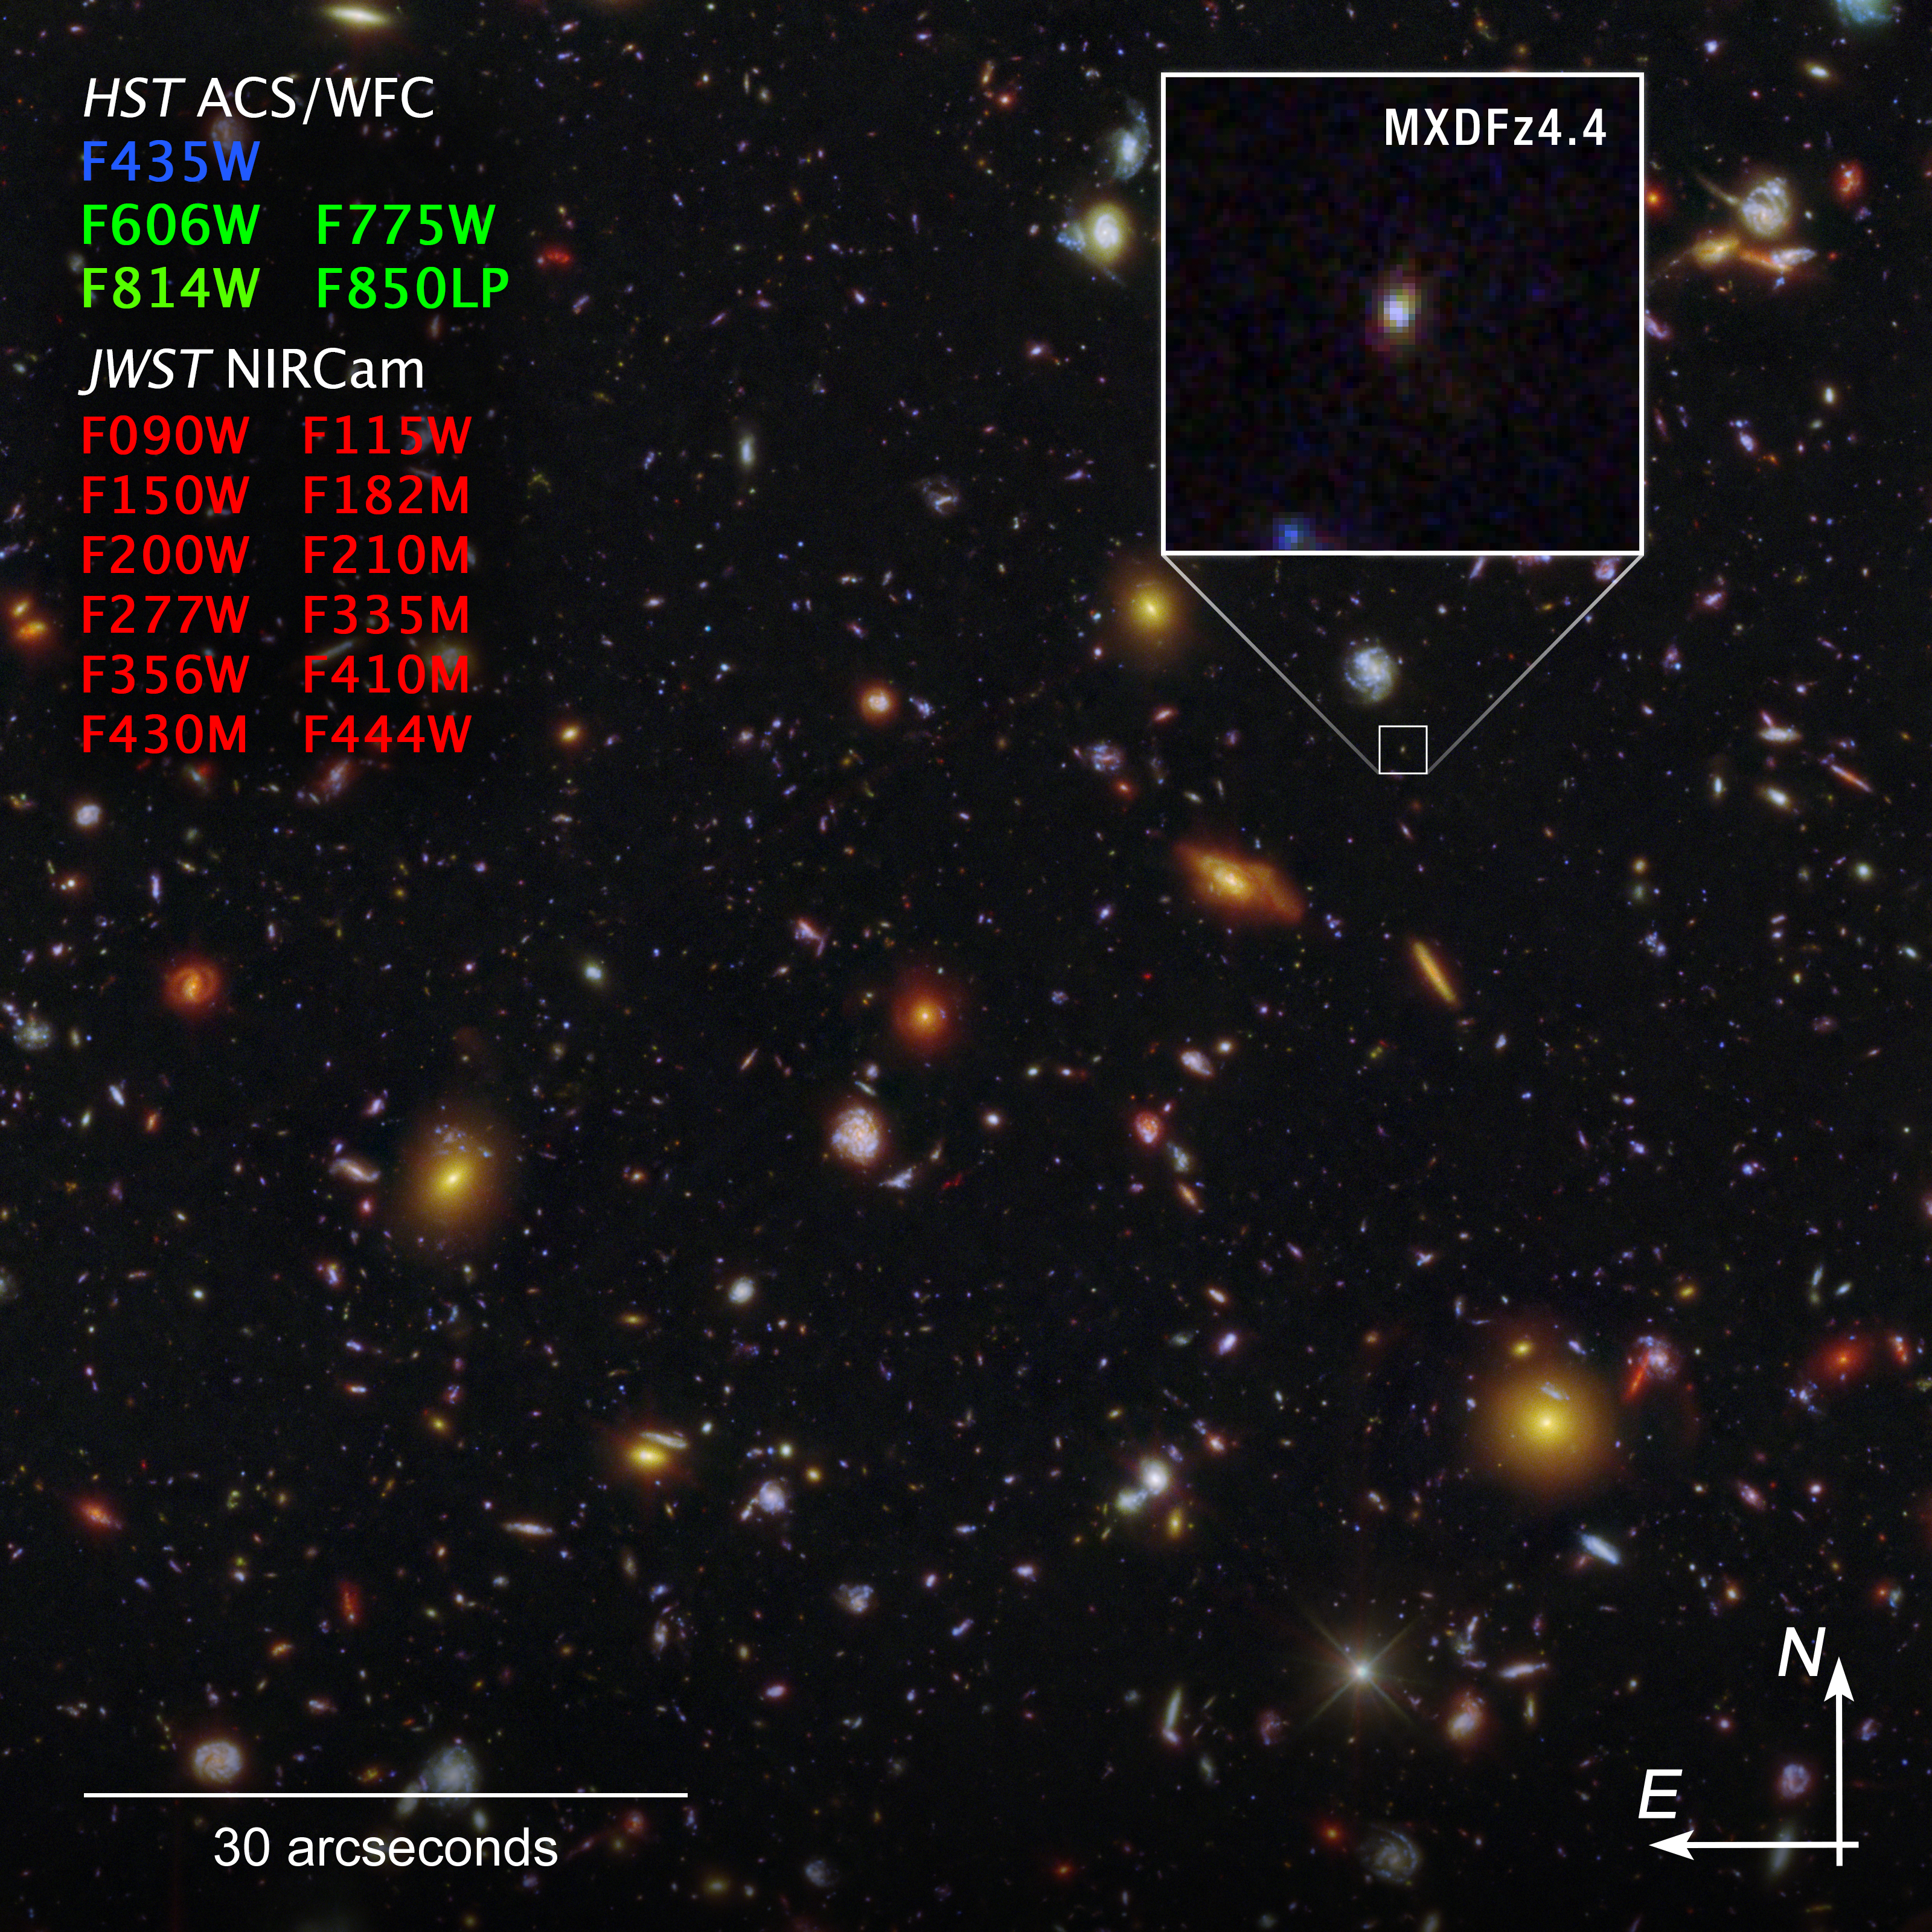

Galaxy MXDFz4.4 (Hubble and Webb compass image)

This shows the galaxy MXDFz4.4, enlarged at right, in the Hubble Ultra Deep Field (HUDF), captured by both the Hubble Space Telescope’s Advanced Camera for Surveys (ACS) and the James Webb Space Telescope’s NIRCam (Near-Infrared Camera). The image shows compass arrows, scale bar, and colour key for reference.

The north and east compass arrows show the orientation of the image on the sky. Note that the relationship between north and east on the sky (as seen from below) is flipped relative to direction arrows on a map of the ground (as seen from above).

At the bottom left, the scale bar is labeled in arcseconds, a measure of angular distance on the sky. One arcsecond is equal to an angular measurement of 1/3600 of one degree. There are 60 arcminutes in a degree and 60 arcseconds in an arcminute. (The full Moon has an angular diameter of about 30 arcminutes.) The actual size of an object that covers one arcsecond on the sky depends on its distance from the telescope.

This image shows visible and near-infrared wavelengths of light that have been translated into visible-light colours. The colour key shows which ACS and NIRCam filters were used when collecting the light. The colour of each filter name is the visible light colour used to represent the light that passes through that filter.

Credit: Image: NASA, ESA, STScI, I. Goovaerts, M. Rafelski, A. Koekemoer (STScI). Image Processing: A. Pagan (STScI)